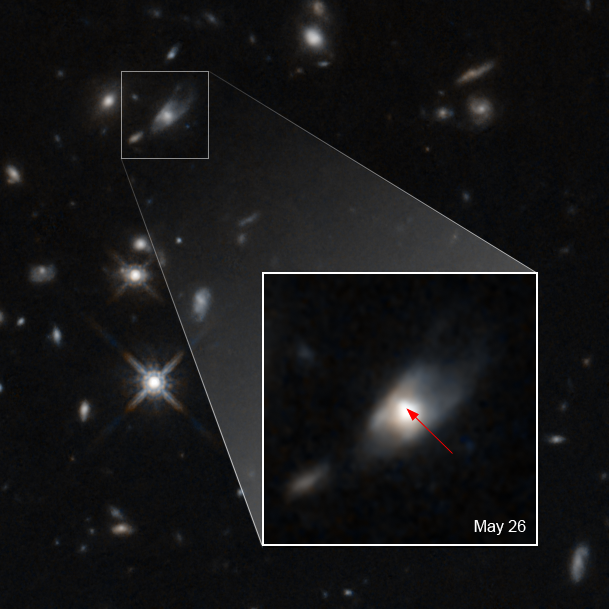

Neutron-Star Collision Releases Puzzling Burst of Infrared Light

This image shows the glow from a kilonova caused by the merger of two neutron stars.

In May of 2020, light from this flash reached Earth and was first detected by NASA's Neil Gehrels Swift Observatory. Scientists quickly enlisted other telescopes — including the NASA/ESA Hubble Space Telescope — to study the explosion's aftermath and the host galaxy.

Hubble found that the near-infrared emission was 10 times brighter than predicted. These results challenge conventional theories of what happens in the aftermath of a short gamma-ray burst. One possibility is that the observations might point to the birth of a massive, highly magnetized neutron star called a magnetar.

The kilonova, whose peak brightness reaches up to 10,000 times that of a classical nova, appears as a bright spot (indicated by the arrow) to the upper left of the host galaxy. The merger of the neutron stars is believed to have produced a magnetar, which has an extremely powerful magnetic field. The energy from that magnetar brightened the material ejected from the explosion.

Credit: NASA, ESA, W. Fong (Northwestern University), and T. Laskar (University of Bath, UK)